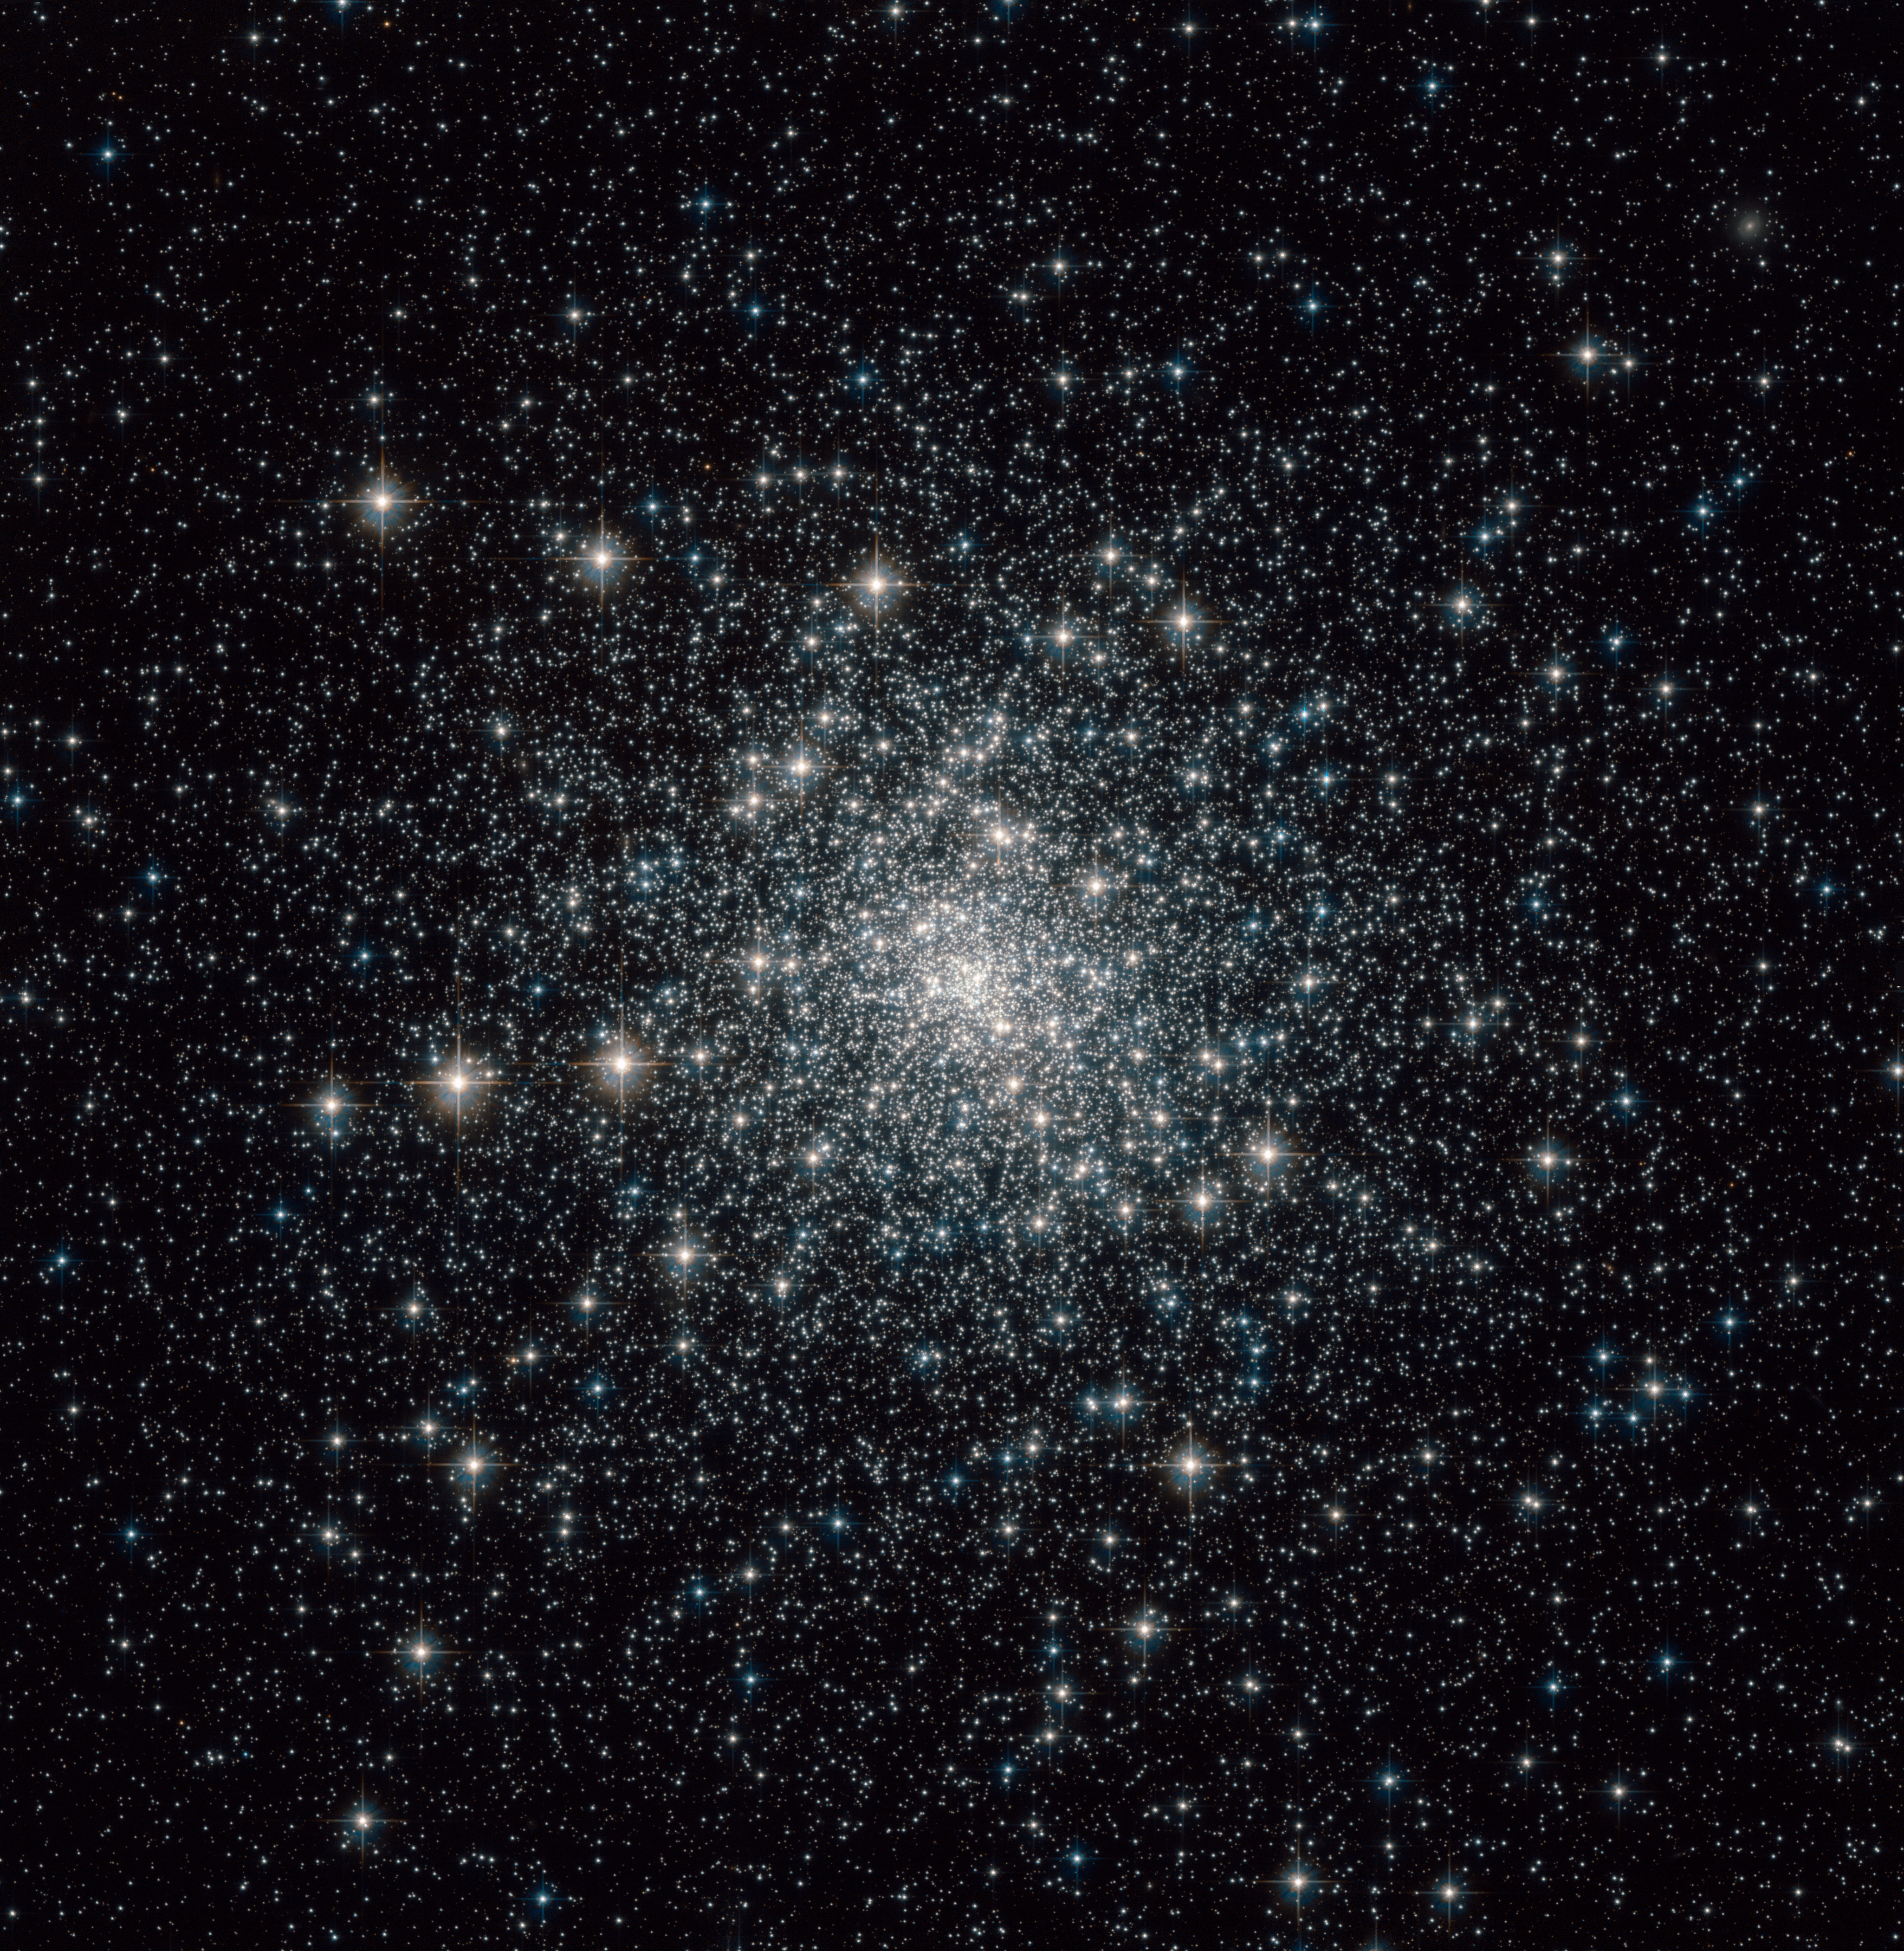

ACS image of Messier 30

This brilliant image of Messier 30 (M 30) was taken by Hubble's Advanced Camera for Surveys (ACS). Messier 30 formed 13 billion years ago and was discovered in 1764 by Charles Messier. Located about 28 000 light-years away from Earth, this globular cluster — a dense swarm of several hundred thousand stars — is about 90 light-years across.

Although globular clusters such as this one are mainly populated by old stars, the crowded field of stars leads to some old stars apparently reclaiming their youth in the form of blue stragglers. Researchers using data from Hubble's now-retired Wide Field Planetary Camera 2 (WFPC2) have identified two types of blue stragglers in Messier 30: those that form in near head-on collisions with one another and those that are in twin (or binary) systems where the less massive star siphons "life-giving" hydrogen from its more massive companion.

Credit: NASA/ ESA